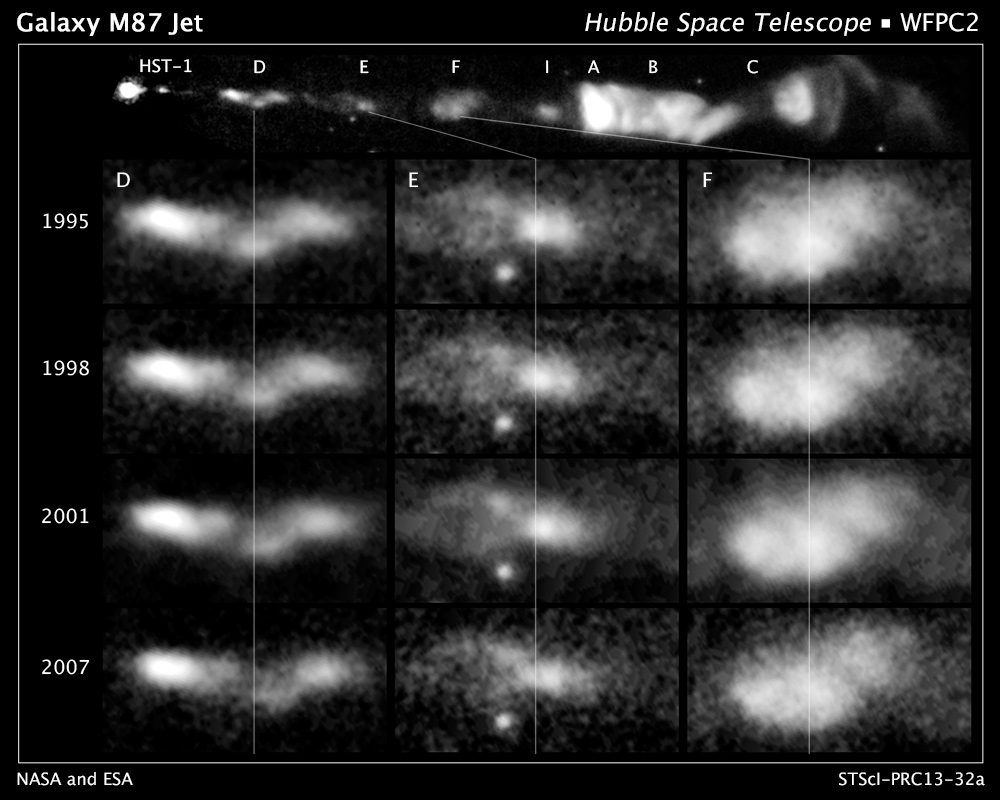

Hubble follows spiral flow of black-hole-powered jet

This sequence of images, taken by the NASA/ESA Hubble Space Telescope over a period of 13 years, reveals changes in a black-hole-powered jet of hot gas in the giant elliptical galaxy M87.

The observations show that the river of plasma, travelling at nearly the speed of light, may follow the spiral structure of the black hole's magnetic field, which astronomers think is coiled like a helix. The magnetic field is believed to arise from a spinning accretion disc of material around a black hole. Although the magnetic field cannot be seen, its presence is inferred by the confinement of the jet along a narrow cone emanating from the black hole. The visible portion of the jet extends for some 5000 light-years.

M87 resides at the centre of the neighbouring Virgo cluster of roughly 2000 galaxies, located 50 million light-years away.

The images are part of a time-lapse movie that reveals changes in the jet from 1995 to 2007. They were taken by Hubble's Advanced Camera for Surveys in 2006 and the Wide Field Planetary Camera 2 in 1995, 1998, 2001, and 2007.

Credit: NASA, ESA, E. Meyer, W. Sparks, J. Biretta, J. Anderson, S.T. Sohn, and R. van der Marel (STScI), C. Norman (Johns Hopkins University), and M. Nakamura (Academia Sinica)